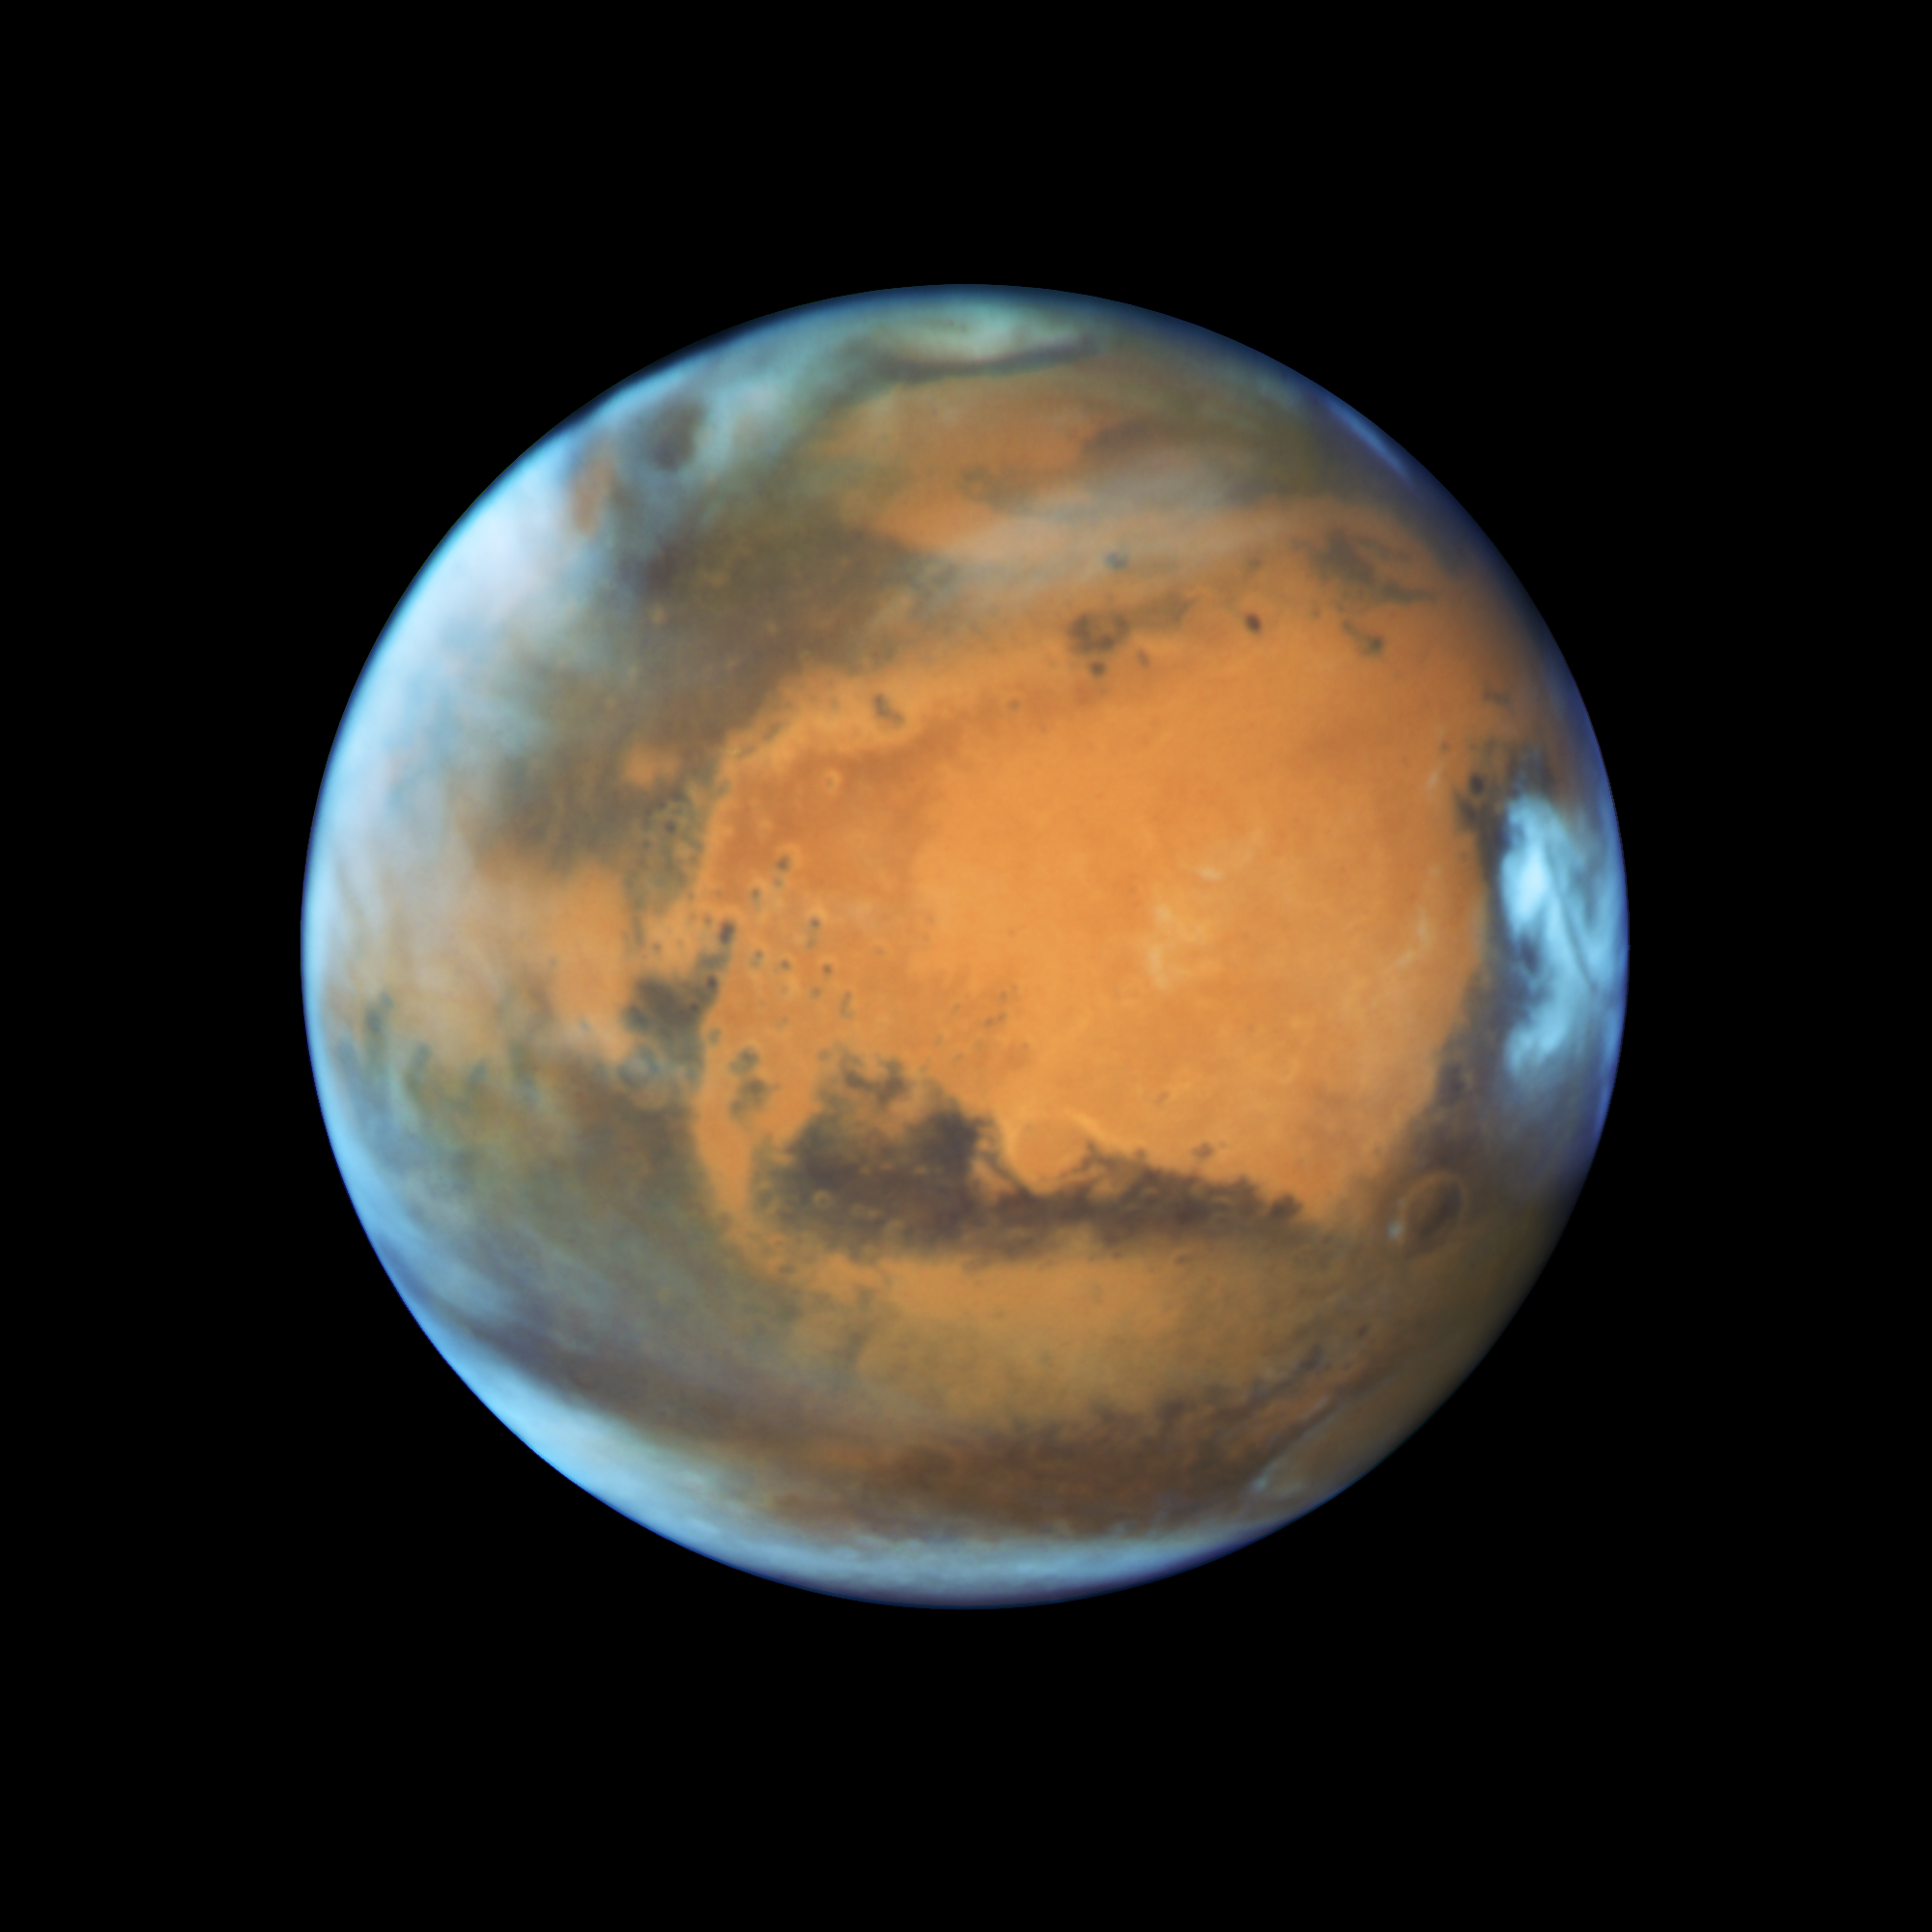

Mars in opposition 2016

This image shows our neighbouring planet Mars, as it was observed shortly before opposition in 2016 by the NASA/ESA Hubble Space Telescope.

Some prominent features of the planet are clearly visible: the ancient and inactive shield volcano Syrtis Major; the bright and oval Hellas Planitia basin; the heavily eroded Arabia Terra in the centre of the image; the dark features of Sinus Sabaeous and Sinus Meridiani along the equator; and the small southern polar cap.

Credit: NASA, ESA, the Hubble Heritage Team (STScI/AURA), J. Bell (ASU), and M. Wolff (Space Science Institute)